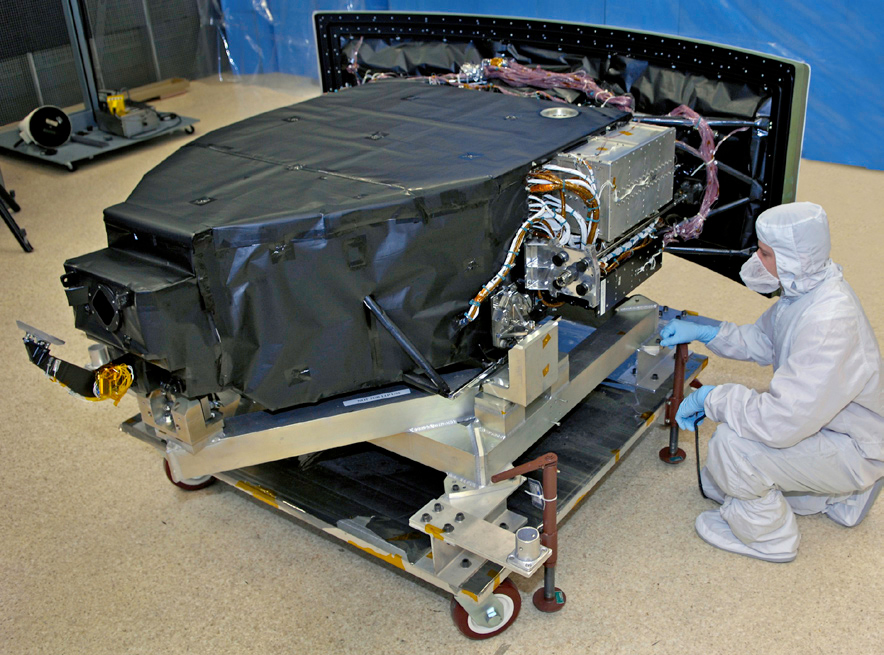

Hubble's Wide Field Camera 3

This photo shows's Hubble's Wide Field Camera 3 (WFC3) being tested before it was launched. The camera was installed during the Servicing Mission 4 in May 2009 and replaced the older Wide Field Planetary Camera 2 (WFPC2).

Credit: NASA